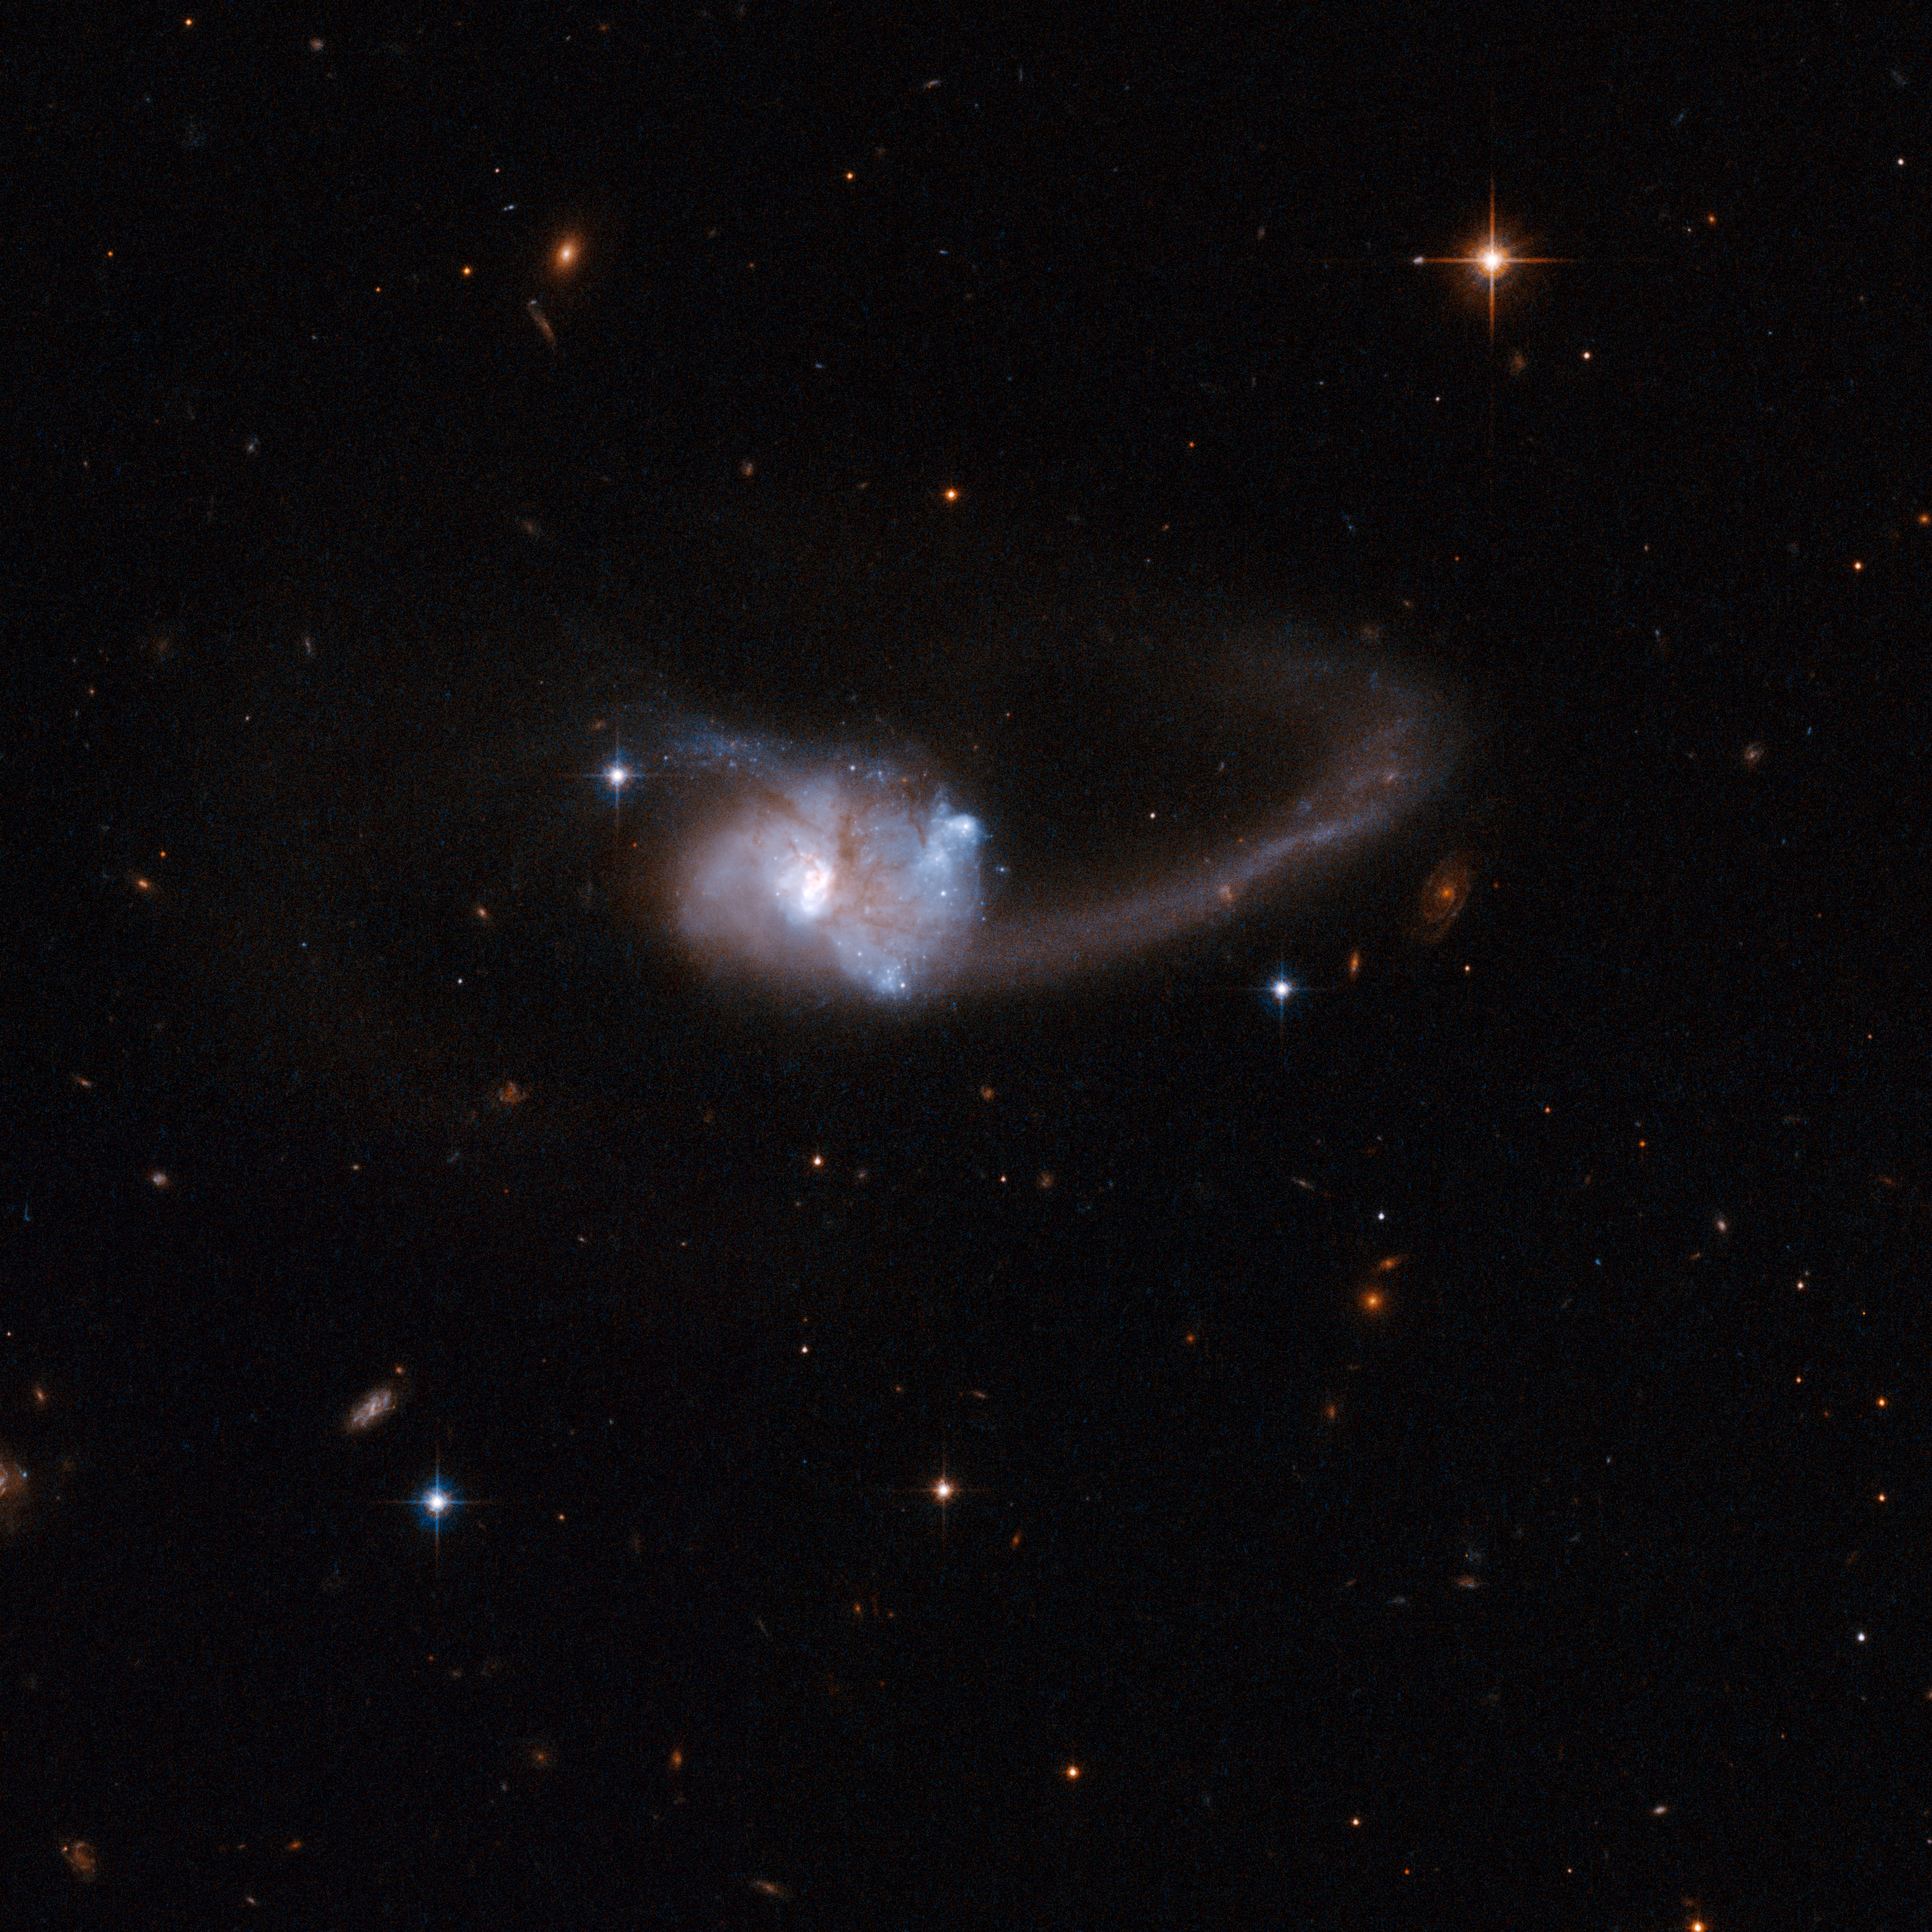

ESO 286-19

ESO 286-19 is a peculiar galaxy that consists of what were originally two disc galaxies that are now in the midst of an ongoing collision. It has undergone a burst of star formation that ended about eight million years ago. ESO 286-19 has a long tail to the right of the main body, and a shorter tail curving to the left. The presence of the tails is a unique signature of the merger process: gas and stars were stripped out by rippling gravitational pulls as the galaxies collided and the outer regions of the parent galaxies were torn off. These tidal tails can persist long after the galaxies have finally merged. ESO 286-19 is located 600 million light-years away from Earth and is an exceptionally luminous source of infrared radiation.

This image is part of a large collection of 59 images of merging galaxies taken by the Hubble Space Telescope and released on the occasion of its 18th anniversary on 24th April 2008.

Credit: NASA, ESA, the Hubble Heritage Team (STScI/AURA)-ESA/Hubble Collaboration and A. Evans (University of Virginia, Charlottesville/NRAO/Stony Brook University)